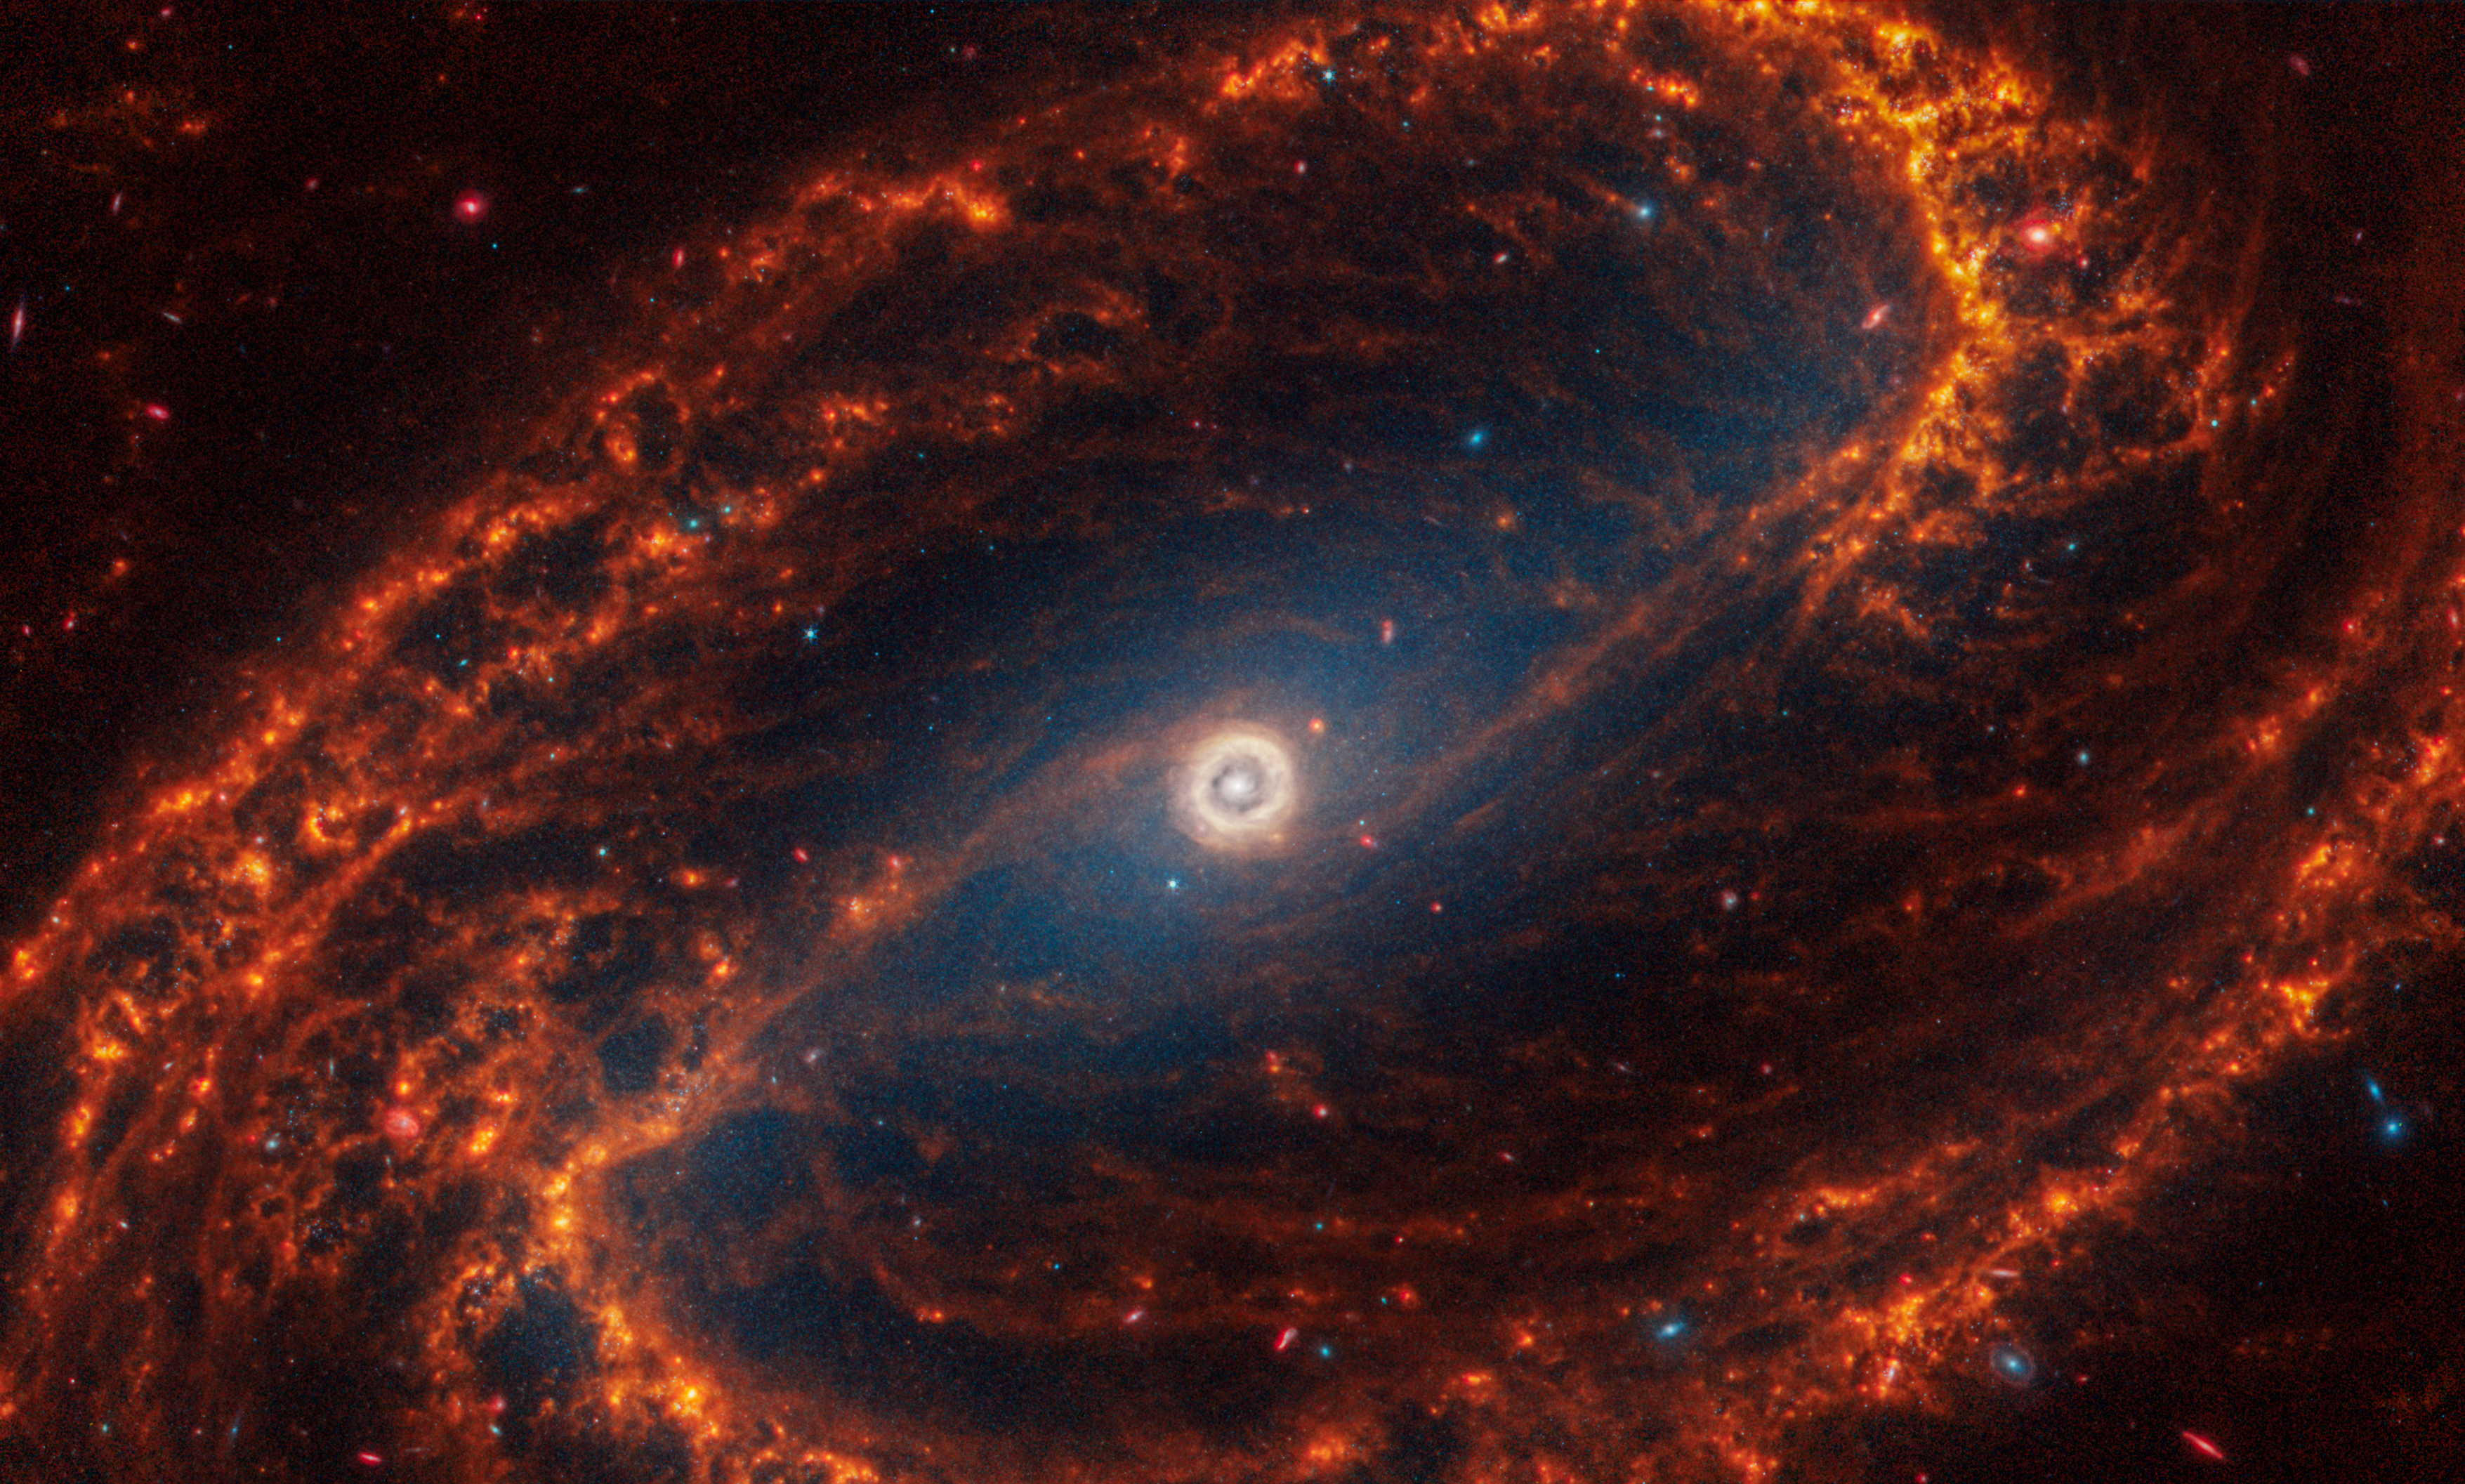

NGC 1300

This spiral galaxy was observed as part of the Physics at High Angular resolution in Nearby GalaxieS (PHANGS) program, a large project that includes observations from several space- and ground-based telescopes of many galaxies to help researchers study all phases of the star formation cycle, from the formation of stars within dusty gas clouds to the energy released in the process that creates the intricate structures revealed by Webb’s new images.

NGC 1300 is 69 million light-years away in the constellation Eridanus.

Learn more about what can be seen in this vast collection of Webb images here.

Credit: NASA, ESA, CSA, STScI, J. Lee (STScI), T. Williams (Oxford), PHANGS Team